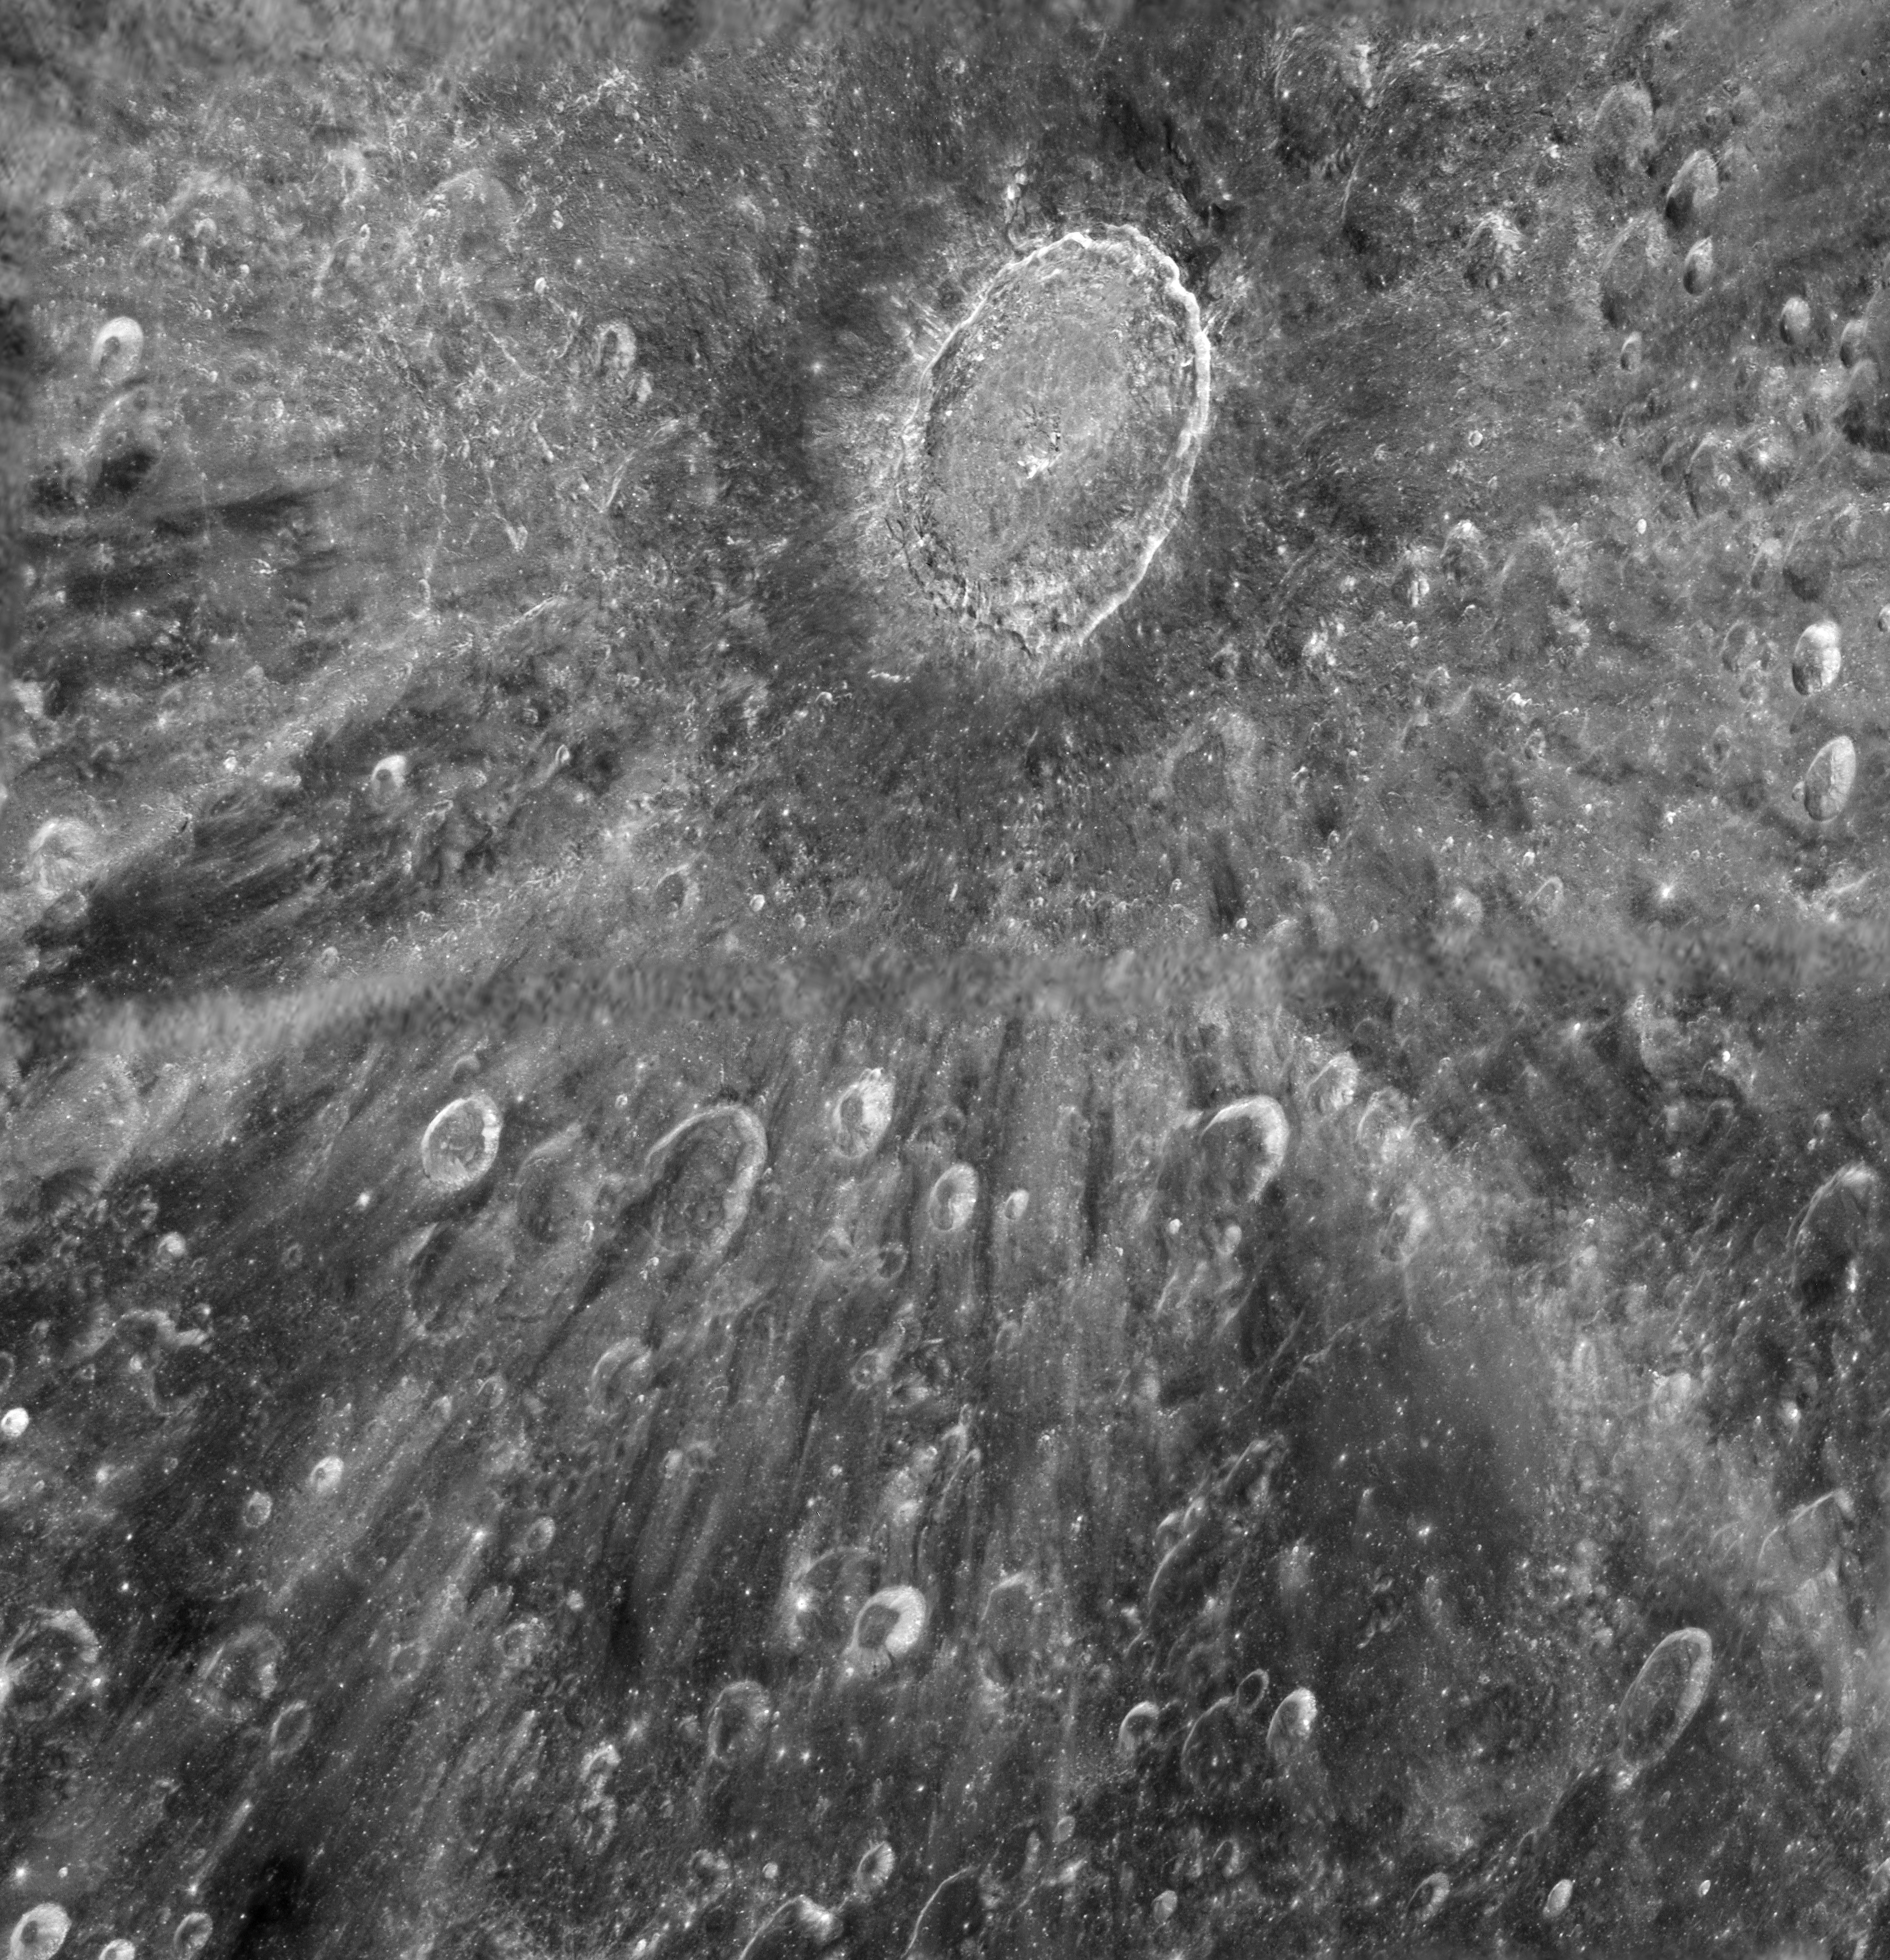

Using the Moon as a mirror — Hubble to watch transit of Venus in reflected light

This mottled landscape showing the impact crater Tycho is among the most violent-looking places on our Moon. But astronomers didn’t aim the NASA/ESA Hubble Space Telescope in this direction to study Tycho itself. The image was taken in preparation for the transit of Venus across the Sun’s face on on 5-6 June 2012.

Hubble cannot look at the Sun directly, so astronomers are planning to point the telescope at Earth’s Moon and use it as a mirror to capture reflected sunlight. During the transit a small fraction of that light will have passed through Venus’s atmosphere and imprinted on that light astronomers expect to find the fingerprints of the planet’s atmospheric makeup.

These observations will mimic a technique that is already being used to sample the atmospheres of giant planets outside our Solar System passing in front of their stars. In the case of the Venus transit observations, astronomers already know the chemical makeup of Venus’s atmosphere, and that it shows no signs of life. But they can use the event to test whether their technique has a chance of detecting the very faint fingerprints of the atmosphere of an Earth-like planet around another star.

This image shows an area approximately 700 kilometres across, and reveals lunar features as small as roughly 170 metres across. The large bullseye near the top of the picture is the impact crater itself, caused by an asteroid strike about 100 million years ago. The bright trail radiating from the crater were formed by material ejected from the impact area during the asteroid collision. Tycho is about 80 kilometers wide and is circled by a rim of material rising almost 5 kilometers above the crater floor.

Because the astronomers only have one shot at observing the transit, they had to carefully plan how the study would be carried out. Part of their planning included these test observations of the Moon made on 11 January 2012.

This is the last time this century sky watchers can view Venus passing in front of the Sun, as the next transit will not happen until 2117.

The image was produced by Hubble’s Advanced Camera for Surveys. A narrow strip along the centre, and small parts of the upper left part of the image were not imaged by Hubble during its observations, and show data from lower-resolution observations made by a ground-based telescope.

Credit: NASA, ESA, D. Ehrenreich (Institut de Planétologie et d’Astrophysique de Grenoble (IPAG)/CNRS/Université Joseph Fourier)